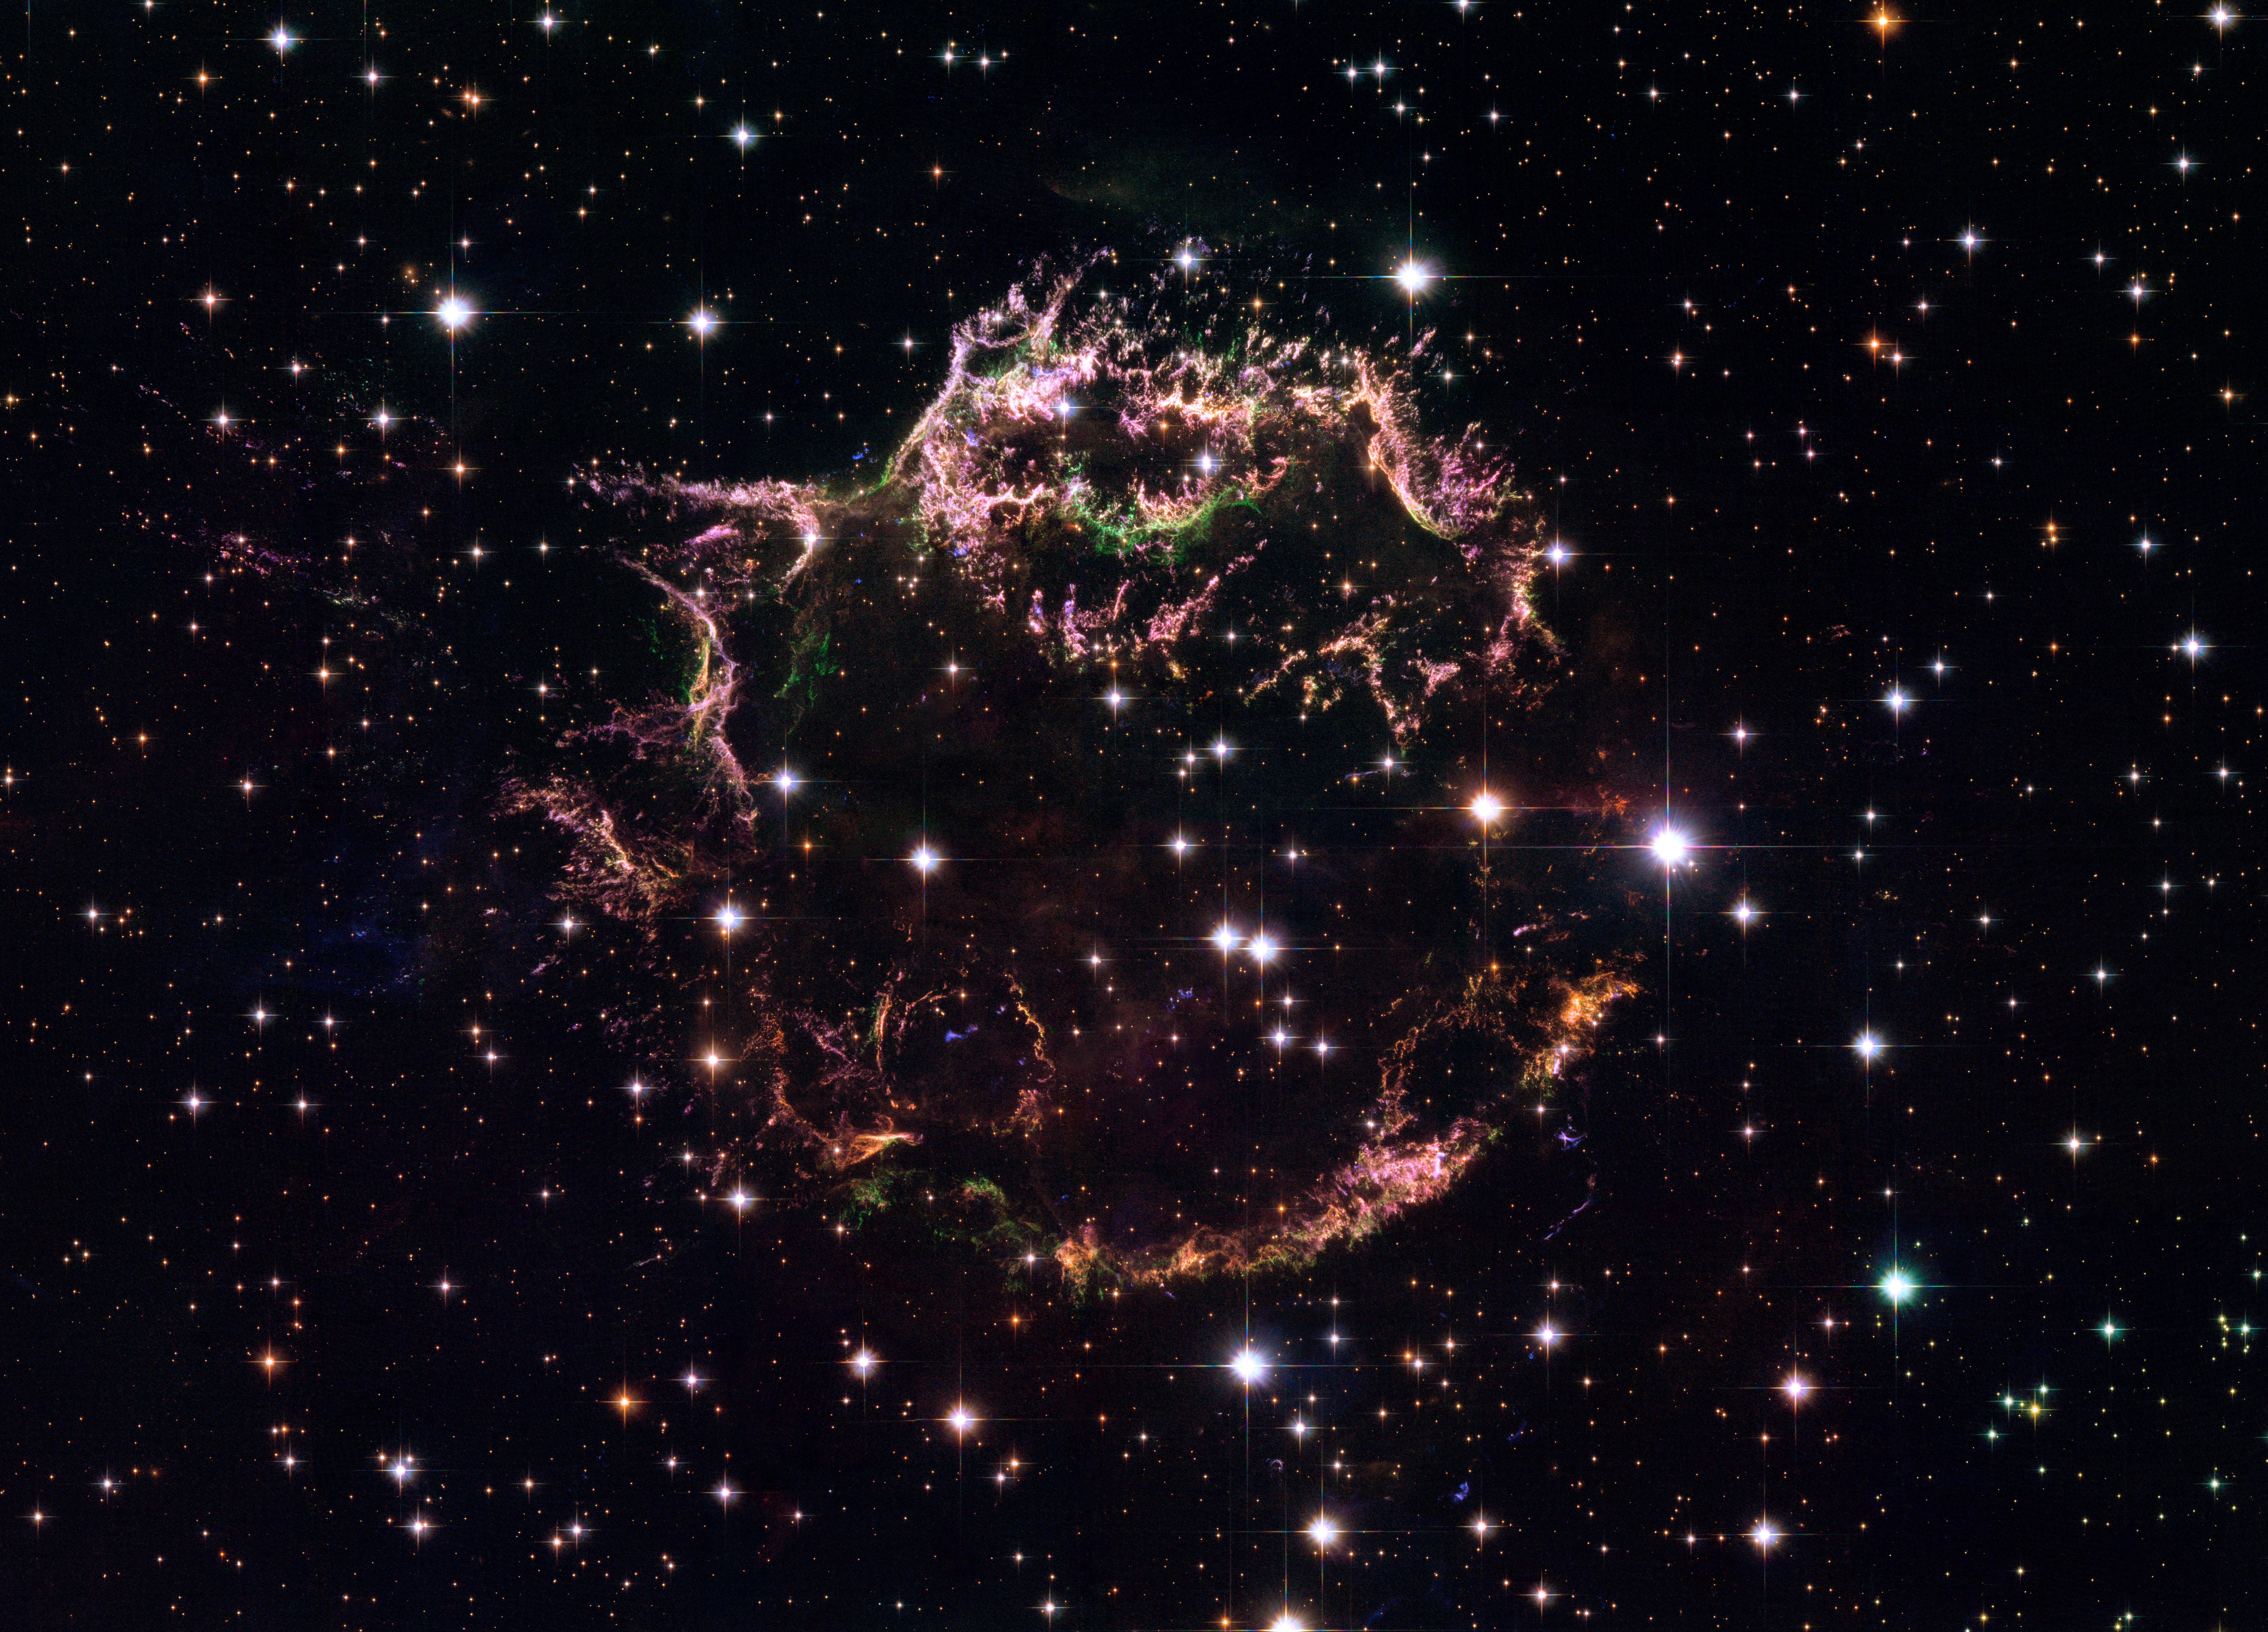

Cassiopeia A - The colourful aftermath of a violent stellar death

A new image taken with the NASA/ESA Hubble Space Telescope provides a detailed look at the tattered remains of a supernova explosion known as Cassiopeia A (Cas A). It is the youngest known remnant from a supernova explosion in the Milky Way. The new Hubble image shows the complex and intricate structure of the star's shattered fragments.

Credit: NASA, ESA, and the Hubble Heritage (STScI/AURA)-ESA/Hubble Collaboration. Acknowledgement: Robert A. Fesen (Dartmouth College, USA) and James Long (ESA/Hubble)